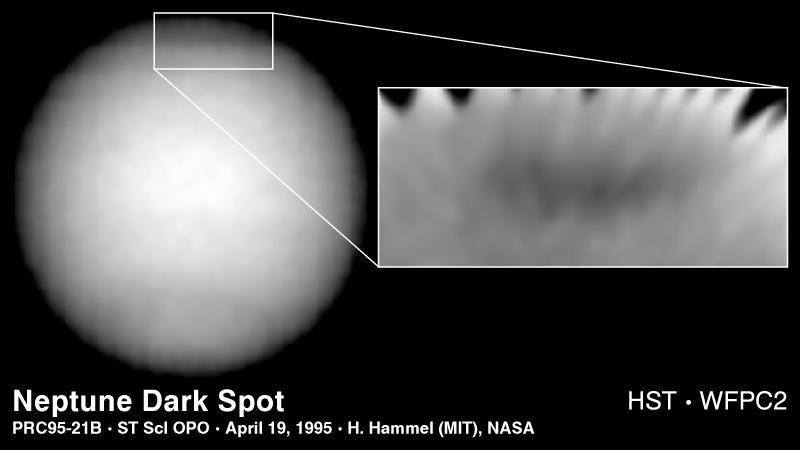

Dark Spot on Neptune

The Hubble Space Telescope has discovered a new great dark spot, located in the northern hemisphere of the planet Neptune. Because the planet's northern hemisphere is now tilted away from Earth, the new feature appears near the limb of the planet.

Credit: H. Hammel (Massachusetts Institute of Technology) and NASA/ESA